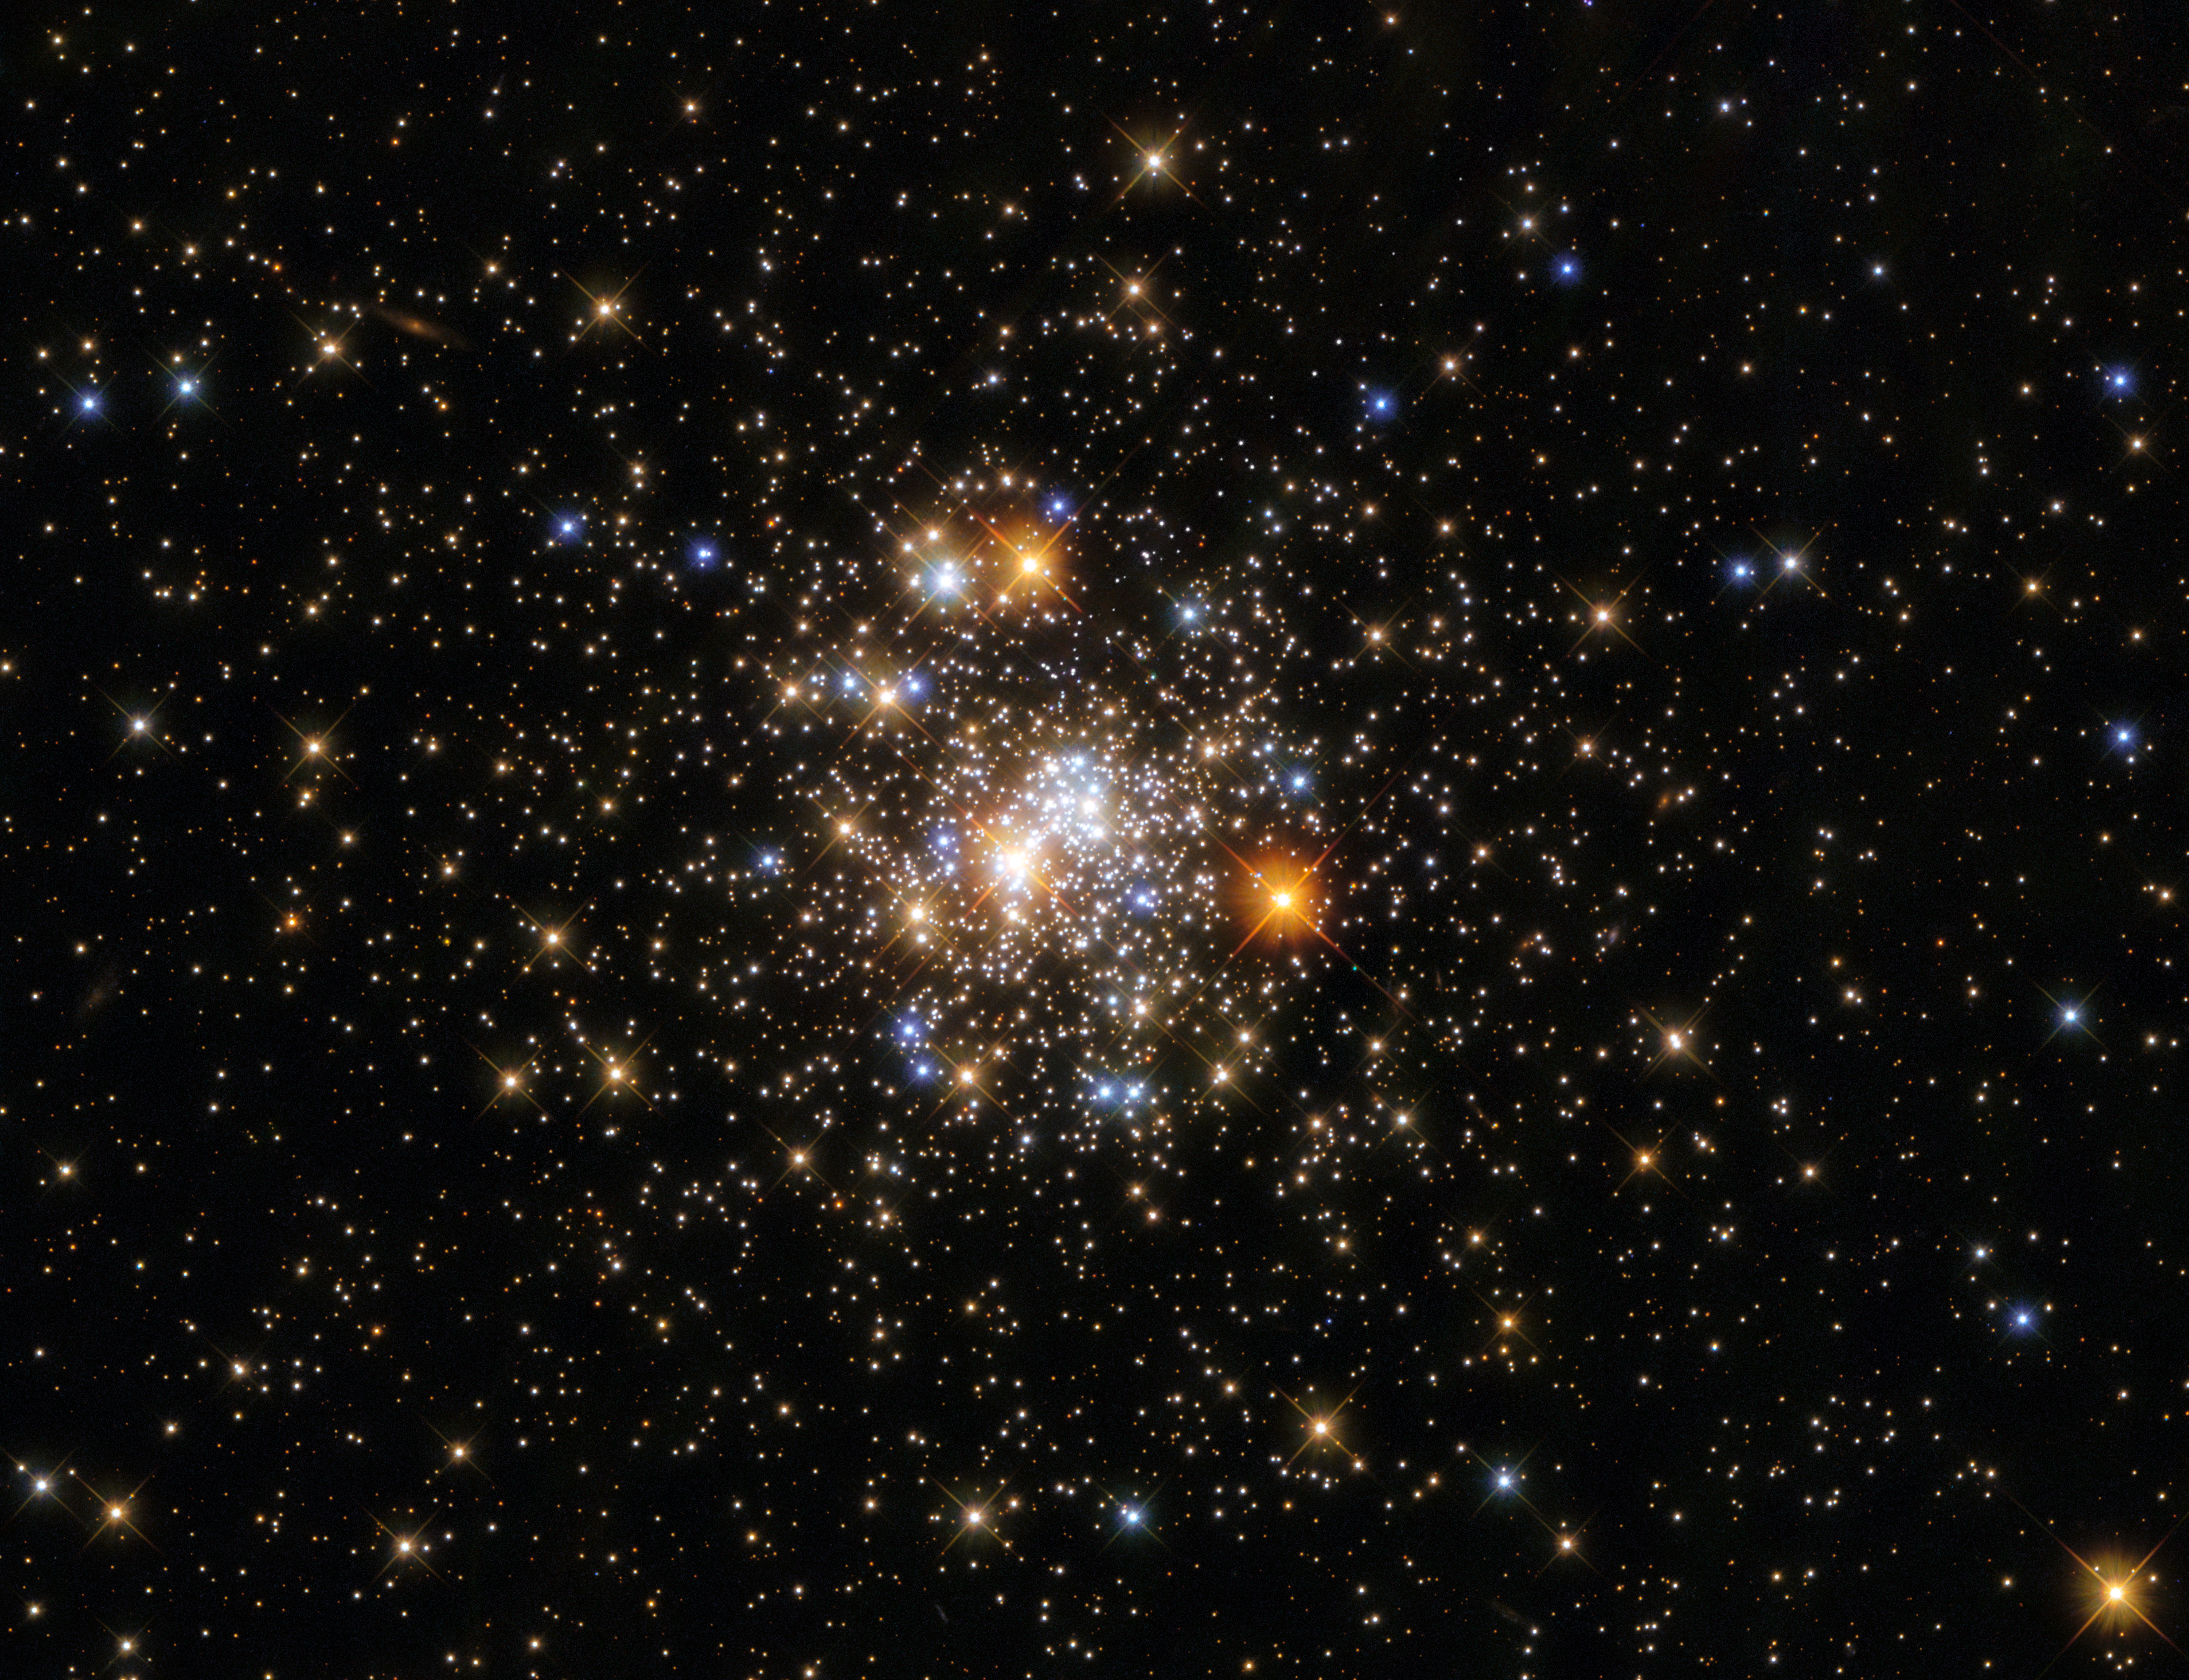

A Glittering Globular Cluster

This star-studded image from the NASA/ESA Hubble Space Telescope depicts NGC 6717, which lies more than 20 000 light-years from Earth in the constellation Sagittarius. NGC 6717 is a globular cluster, a roughly spherical collection of stars tightly bound together by gravity. Globular clusters contain more stars in their centres than their outer fringes, as this image aptly demonstrates; the sparsely populated edges of NGC 6717 are in stark contrast to the sparkling collection of stars at its centre.

The centre of the image also contains some interlopers from closer to home. Bright foreground stars close to Earth are surrounded by criss-cross diffraction spikes formed by starlight interacting with the structures supporting Hubble’s secondary mirror.

The area of the night sky which contains the constellation Sagittarius also contains the centre of the Milky Way, which is filled with light-absorbing gas and dust. This absorption of light — which astronomers refer to as extinction — makes studying globular clusters near the Galactic centre a challenging endeavour. To determine the properties of NGC 6717, astronomers relied on a combination of Hubble’s Wide Field Camera 3 and the Advanced Camera for Surveys.

Credit: ESA/Hubble and NASA, A. Sarajedini